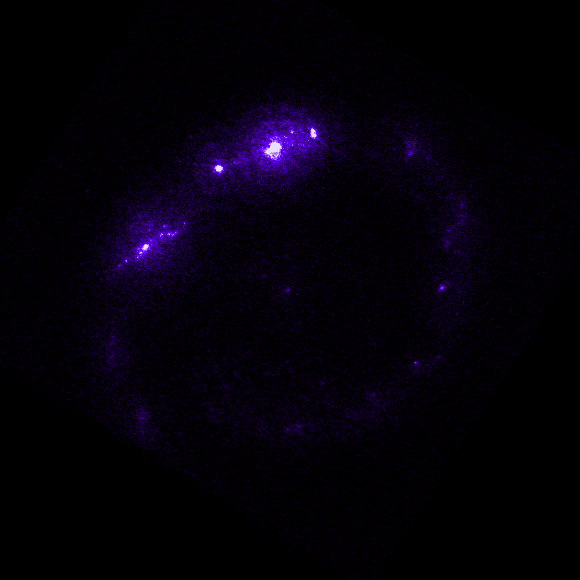

Individual colour images - 1 (FOC, 220 nm)

This is the first in a sequence of seven images which demonstrate the Hubble telescope's wavelength range, starting in the far ultraviolet and stretching all the way to the infrared.

This image was taken by the Faint Object Camera (built by the European Space Agency, ESA). The colour purple (220 nm) represents ultraviolet light, which cannot be seen by the human eye. The image was taken on 18 July, 1993, and has an exposure time of 596 s.

This image is issued jointly by NASA and ESA.

Credit: NASA, ESA, Dan Maoz (Tel-Aviv University, Israel, and Columbia University, USA)